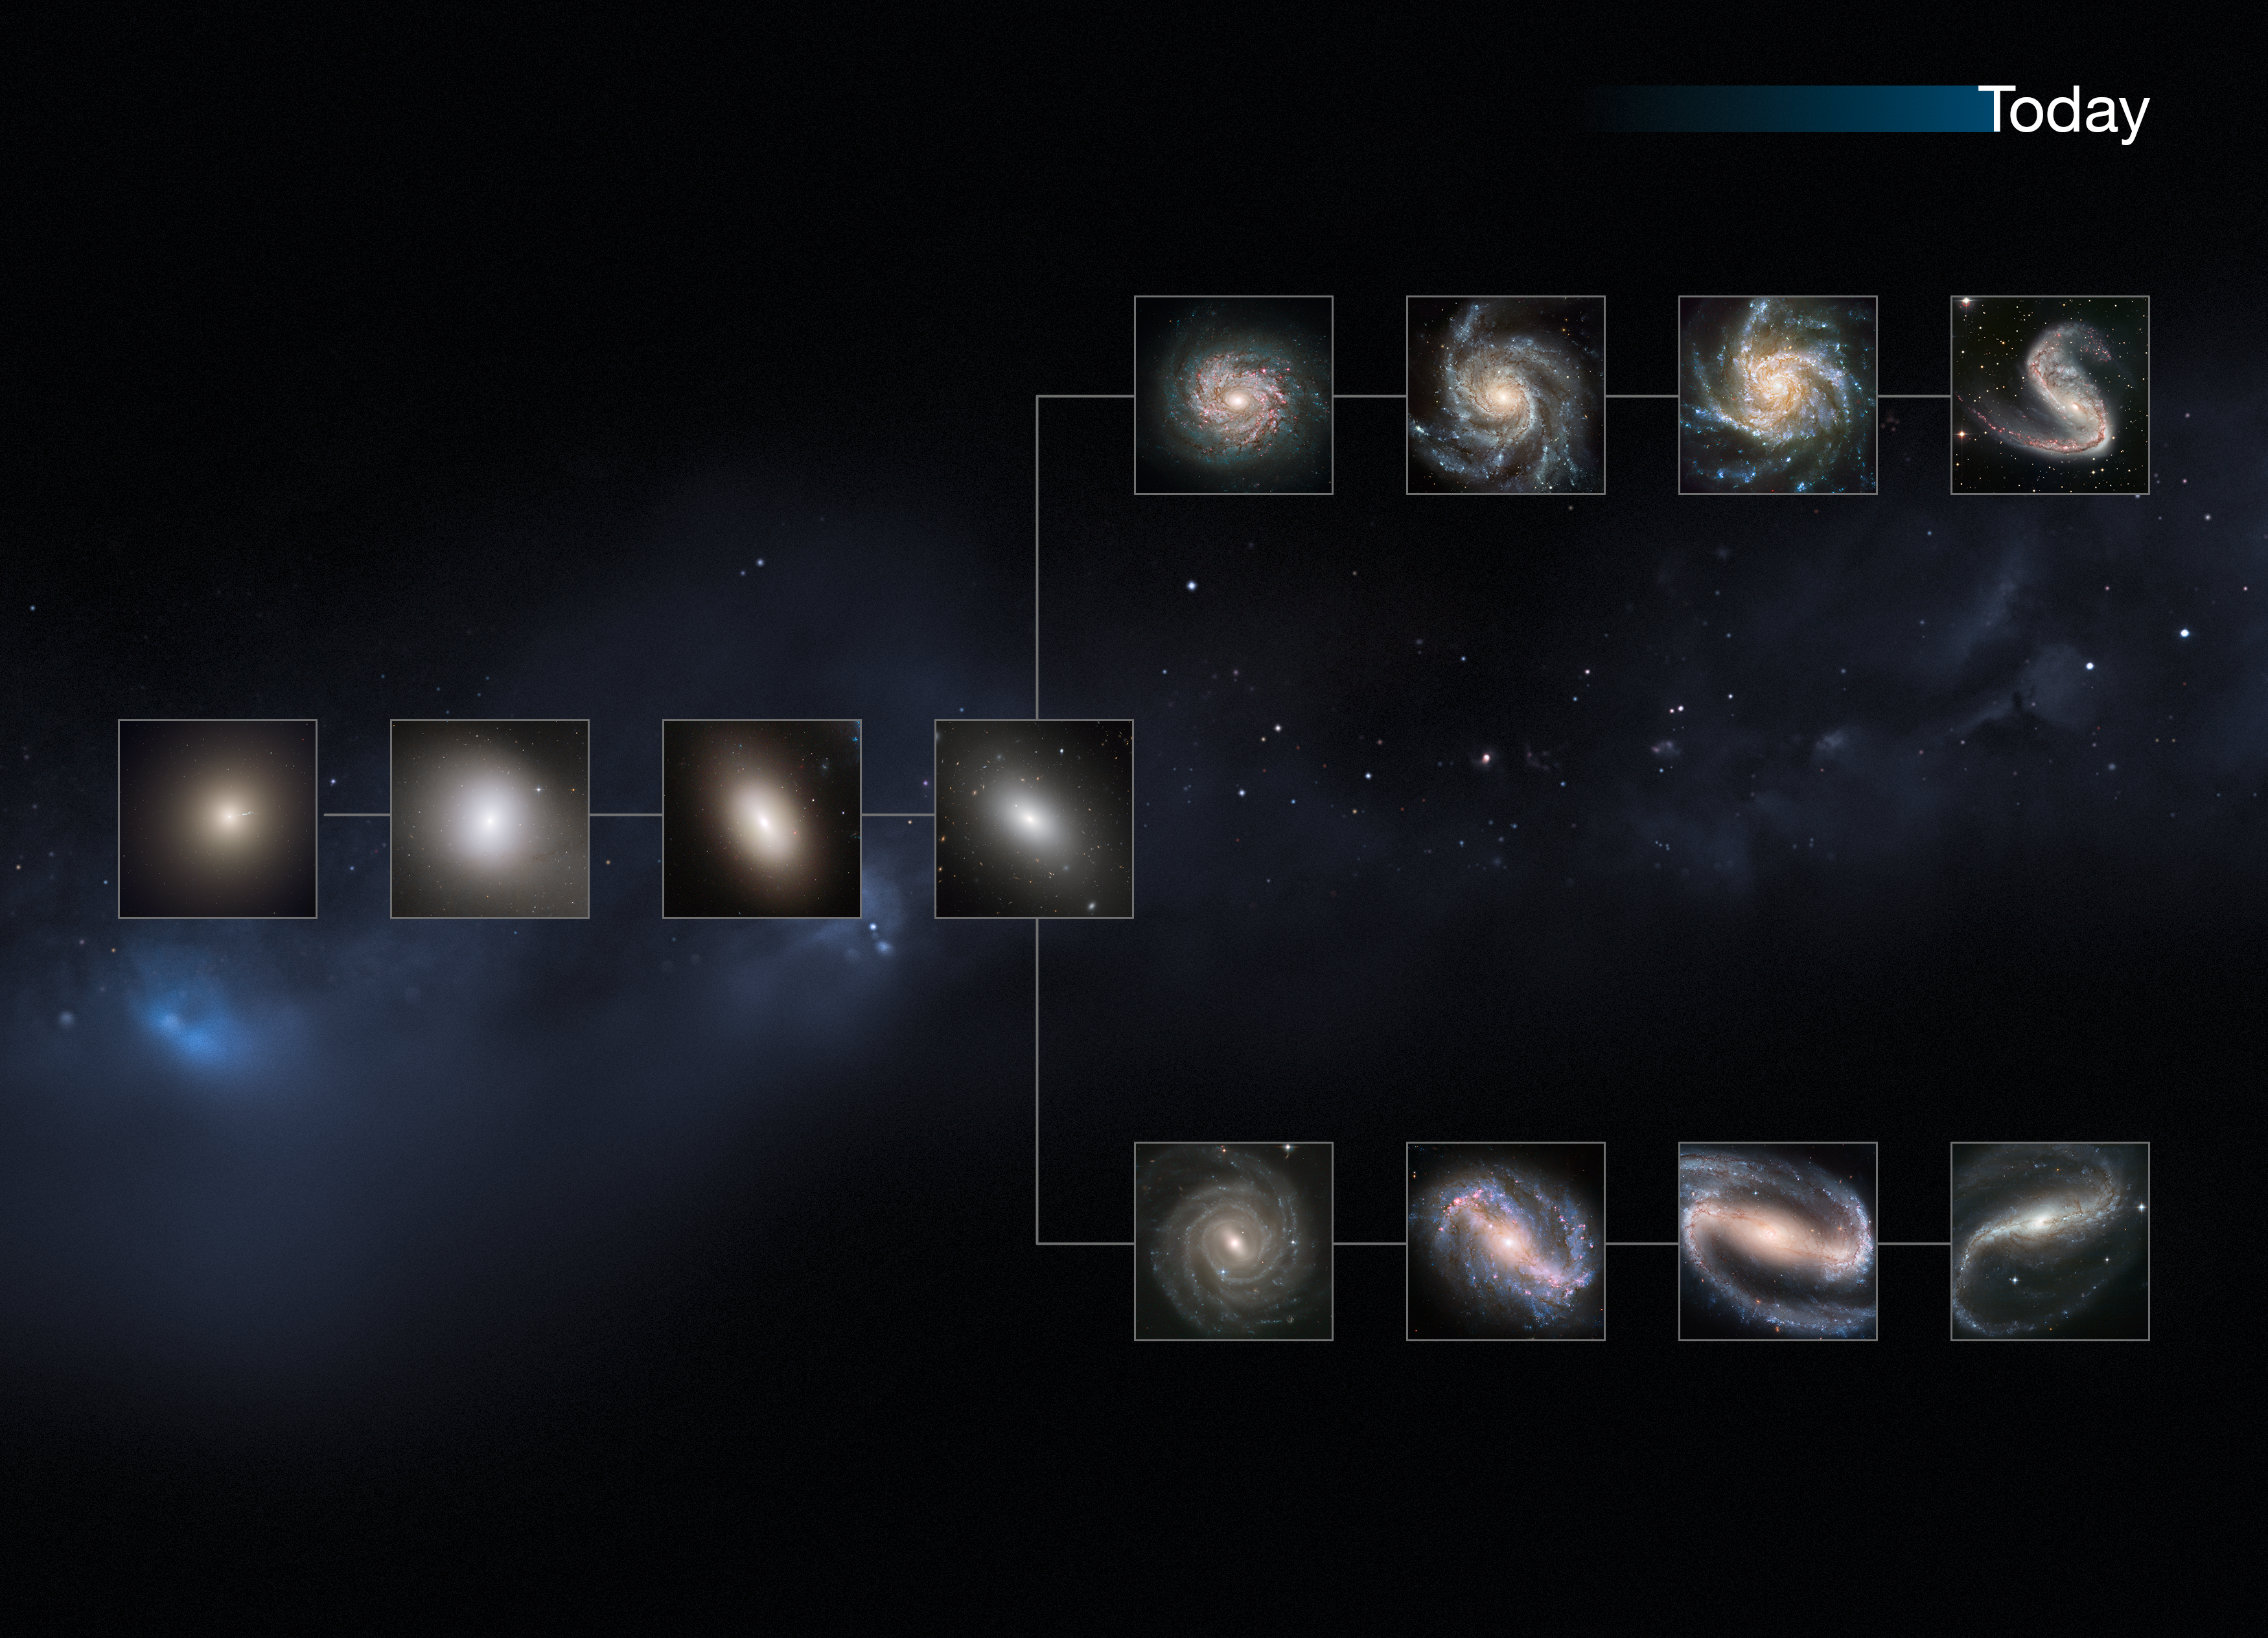

The present day Universe

This image shows a "slice" of the Universe as it is today. The shape is that of the Hubble tuning fork diagram, which describes and separates galaxies according to their morphology into spiral (S), elliptical (E), and lenticular (S0) galaxies. On the left of this diagram are the ellipticals, with lenticulars in the middle, and the spirals branching out on the right side. The spirals on the bottom branch have bars cutting through their centres. Our local Universe displays big, fully formed and intricate galaxy shapes.

This image is illustrative; the Hubble images used were selected based on their appearance. The individual distances to these galaxies are only approximate.

Credit: NASA, ESA, M. Kornmesser